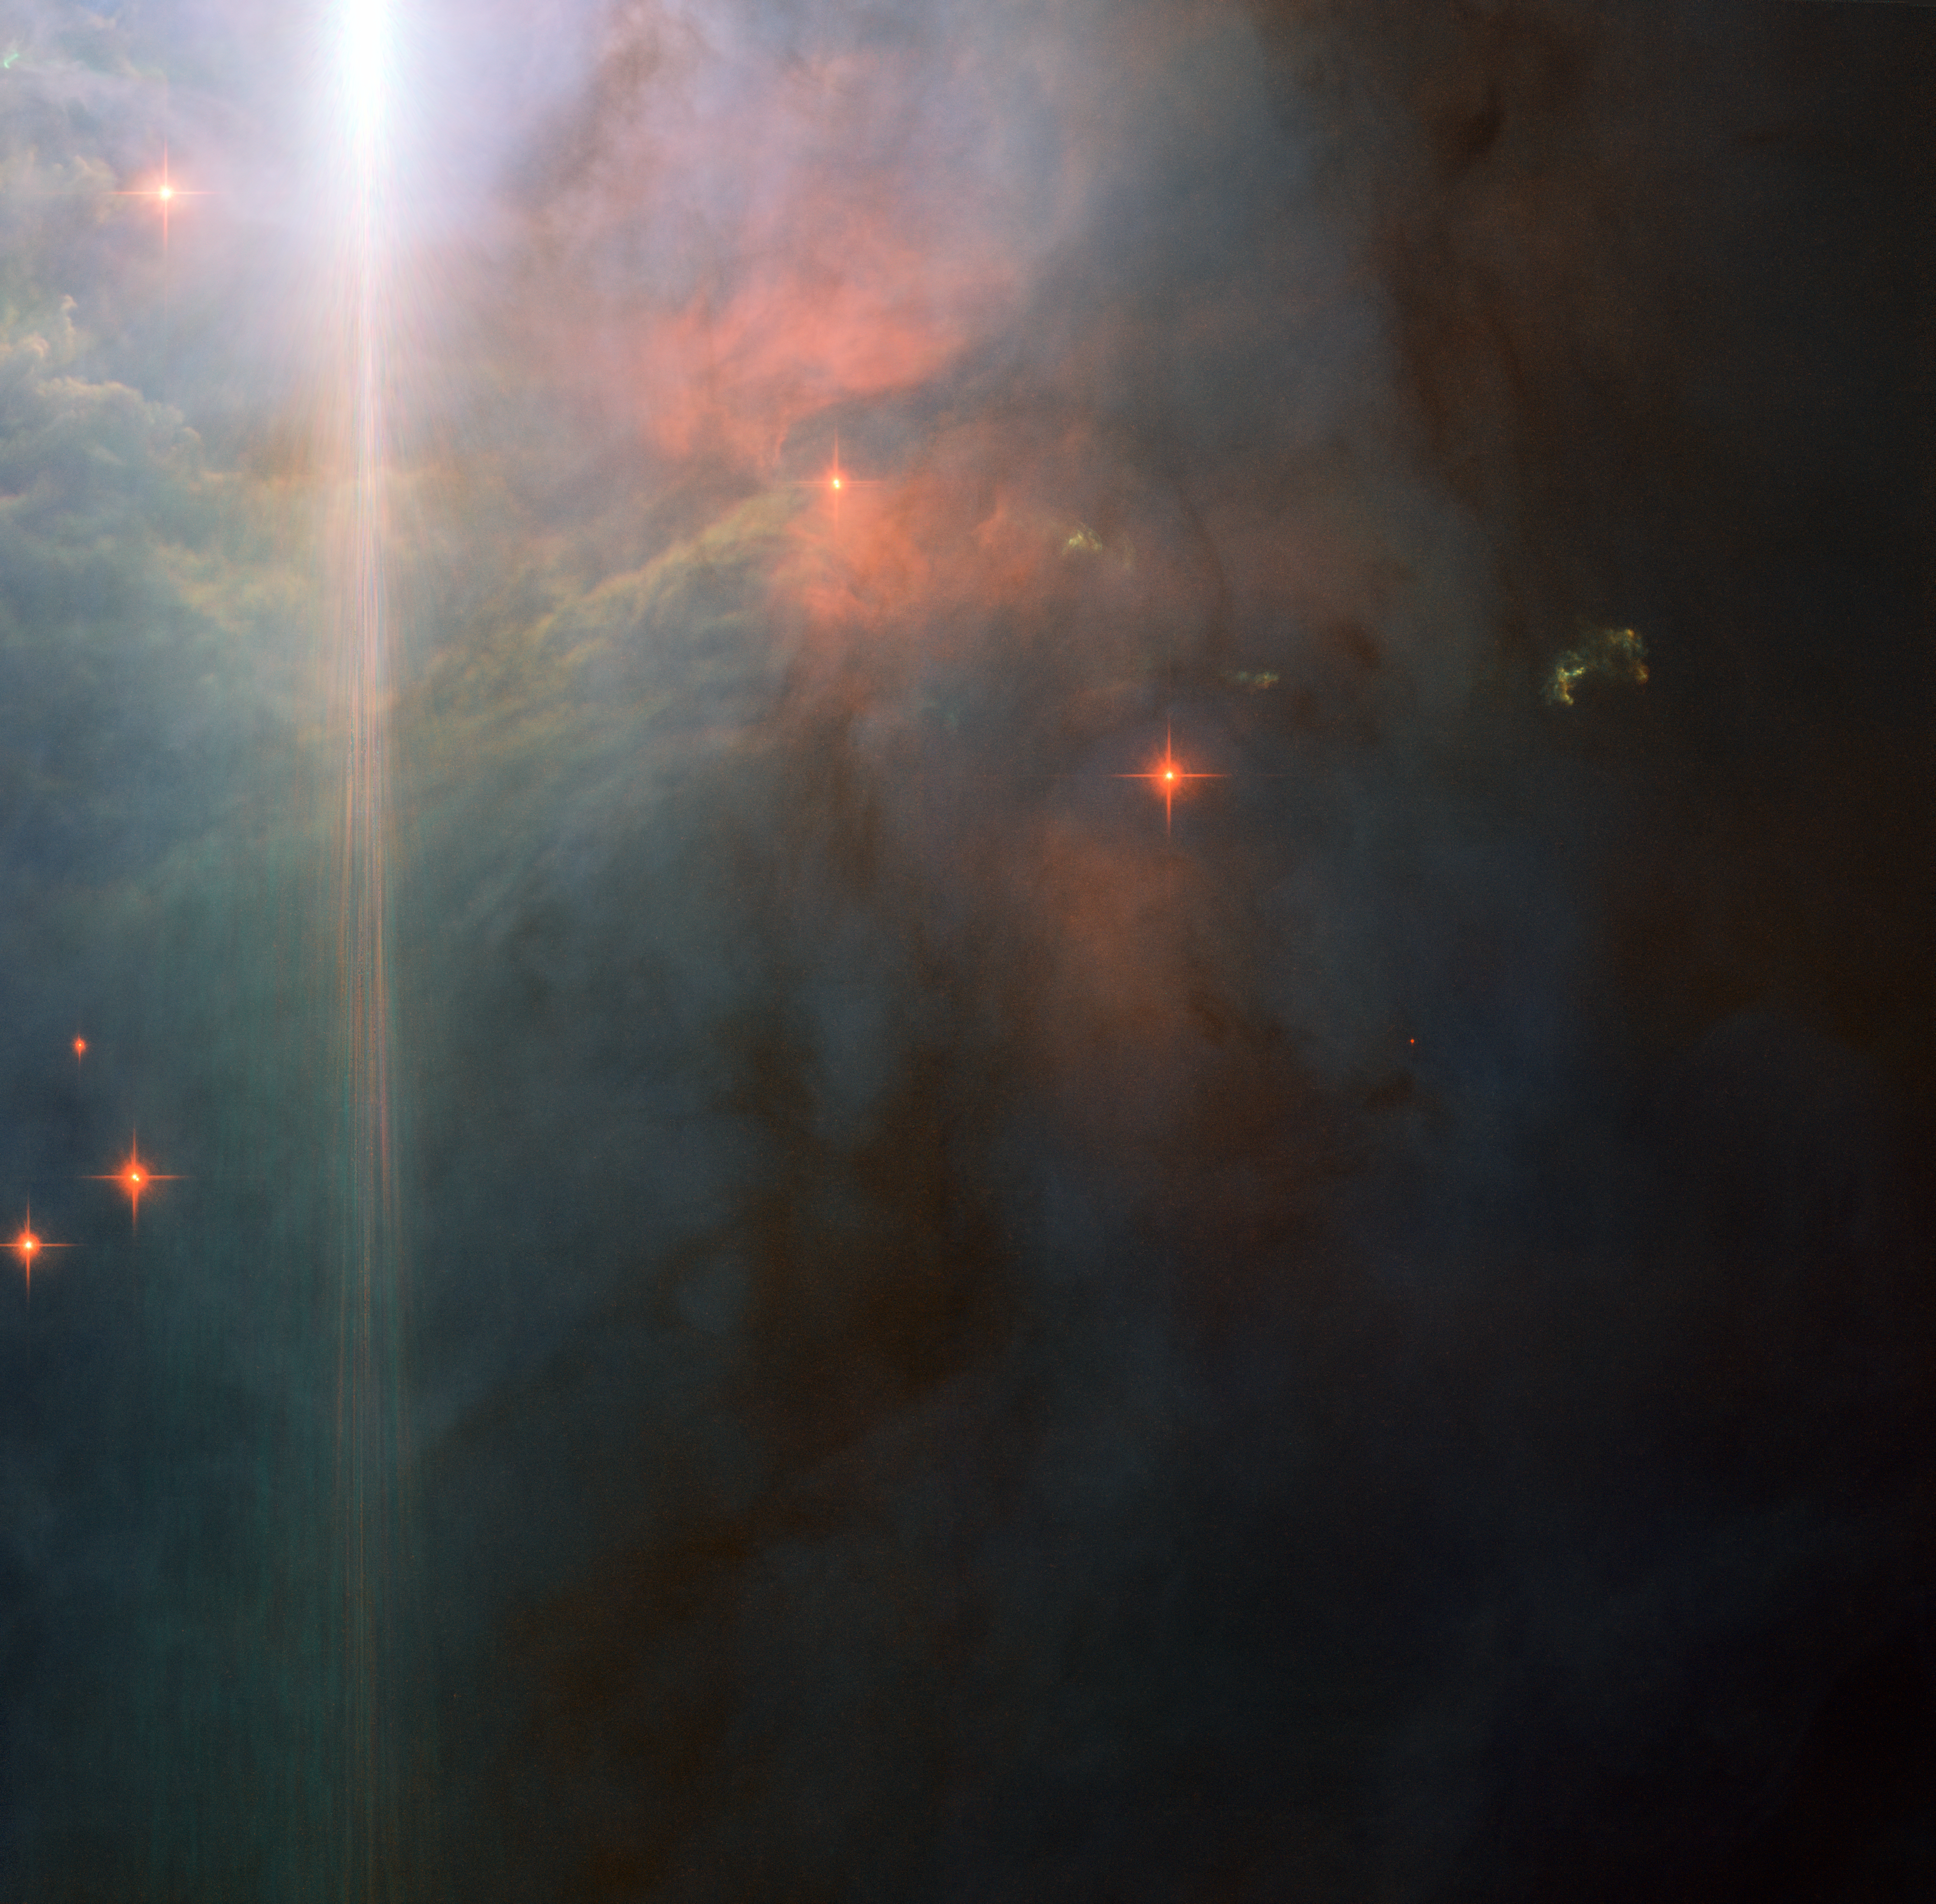

Sunset glow in Orion

NGC 2023 surrounds a massive young B-type star. These stars are large, bright and blue-white in colour, and have a high surface temperature, being several times hotter than the Sun. The energy emitted from NGC2023’s B-type star illuminates the nebula, resulting in its high surface brightness: good news for astronomers who wish to study it. The star itself lies outside the field of view, at the upper left, and its brilliant light is scattered by Hubble’s optical system, creating the bright flare across the left side of the picture, which is not a real feature of the nebula.

Stars are forming from the material comprising NGC 2023. This Hubble image captures the billowing waves of gas, 5000 times denser than the interstellar medium. The unusual greenish clumps are thought to be Herbig–Haro objects. These peculiar features of star-forming regions are created when gas ejected at hundreds of kilometres per second from newly formed stars impacts the surrounding material. These shockwaves cause the gas to glow and result in the strange shapes seen here. Herbig–Haro objects typically only last for a few thousand years, which is the blink of eye in astronomical terms.

This picture was created from multiple images taken with the Wide Field Camera of Hubble’s Advanced Camera for Surveys. Exposures through a blue filter (F475W) are coloured blue, exposures through a yellow filter (F625W) are coloured green and images through a near-infrared filter (F850LP) are shown as red. The total exposure times per filter are 800 s, 800 s and 1200 s, respectively, and the field of view spans 3.2 arcminutes.

Credit: ESA/Hubble & NASA